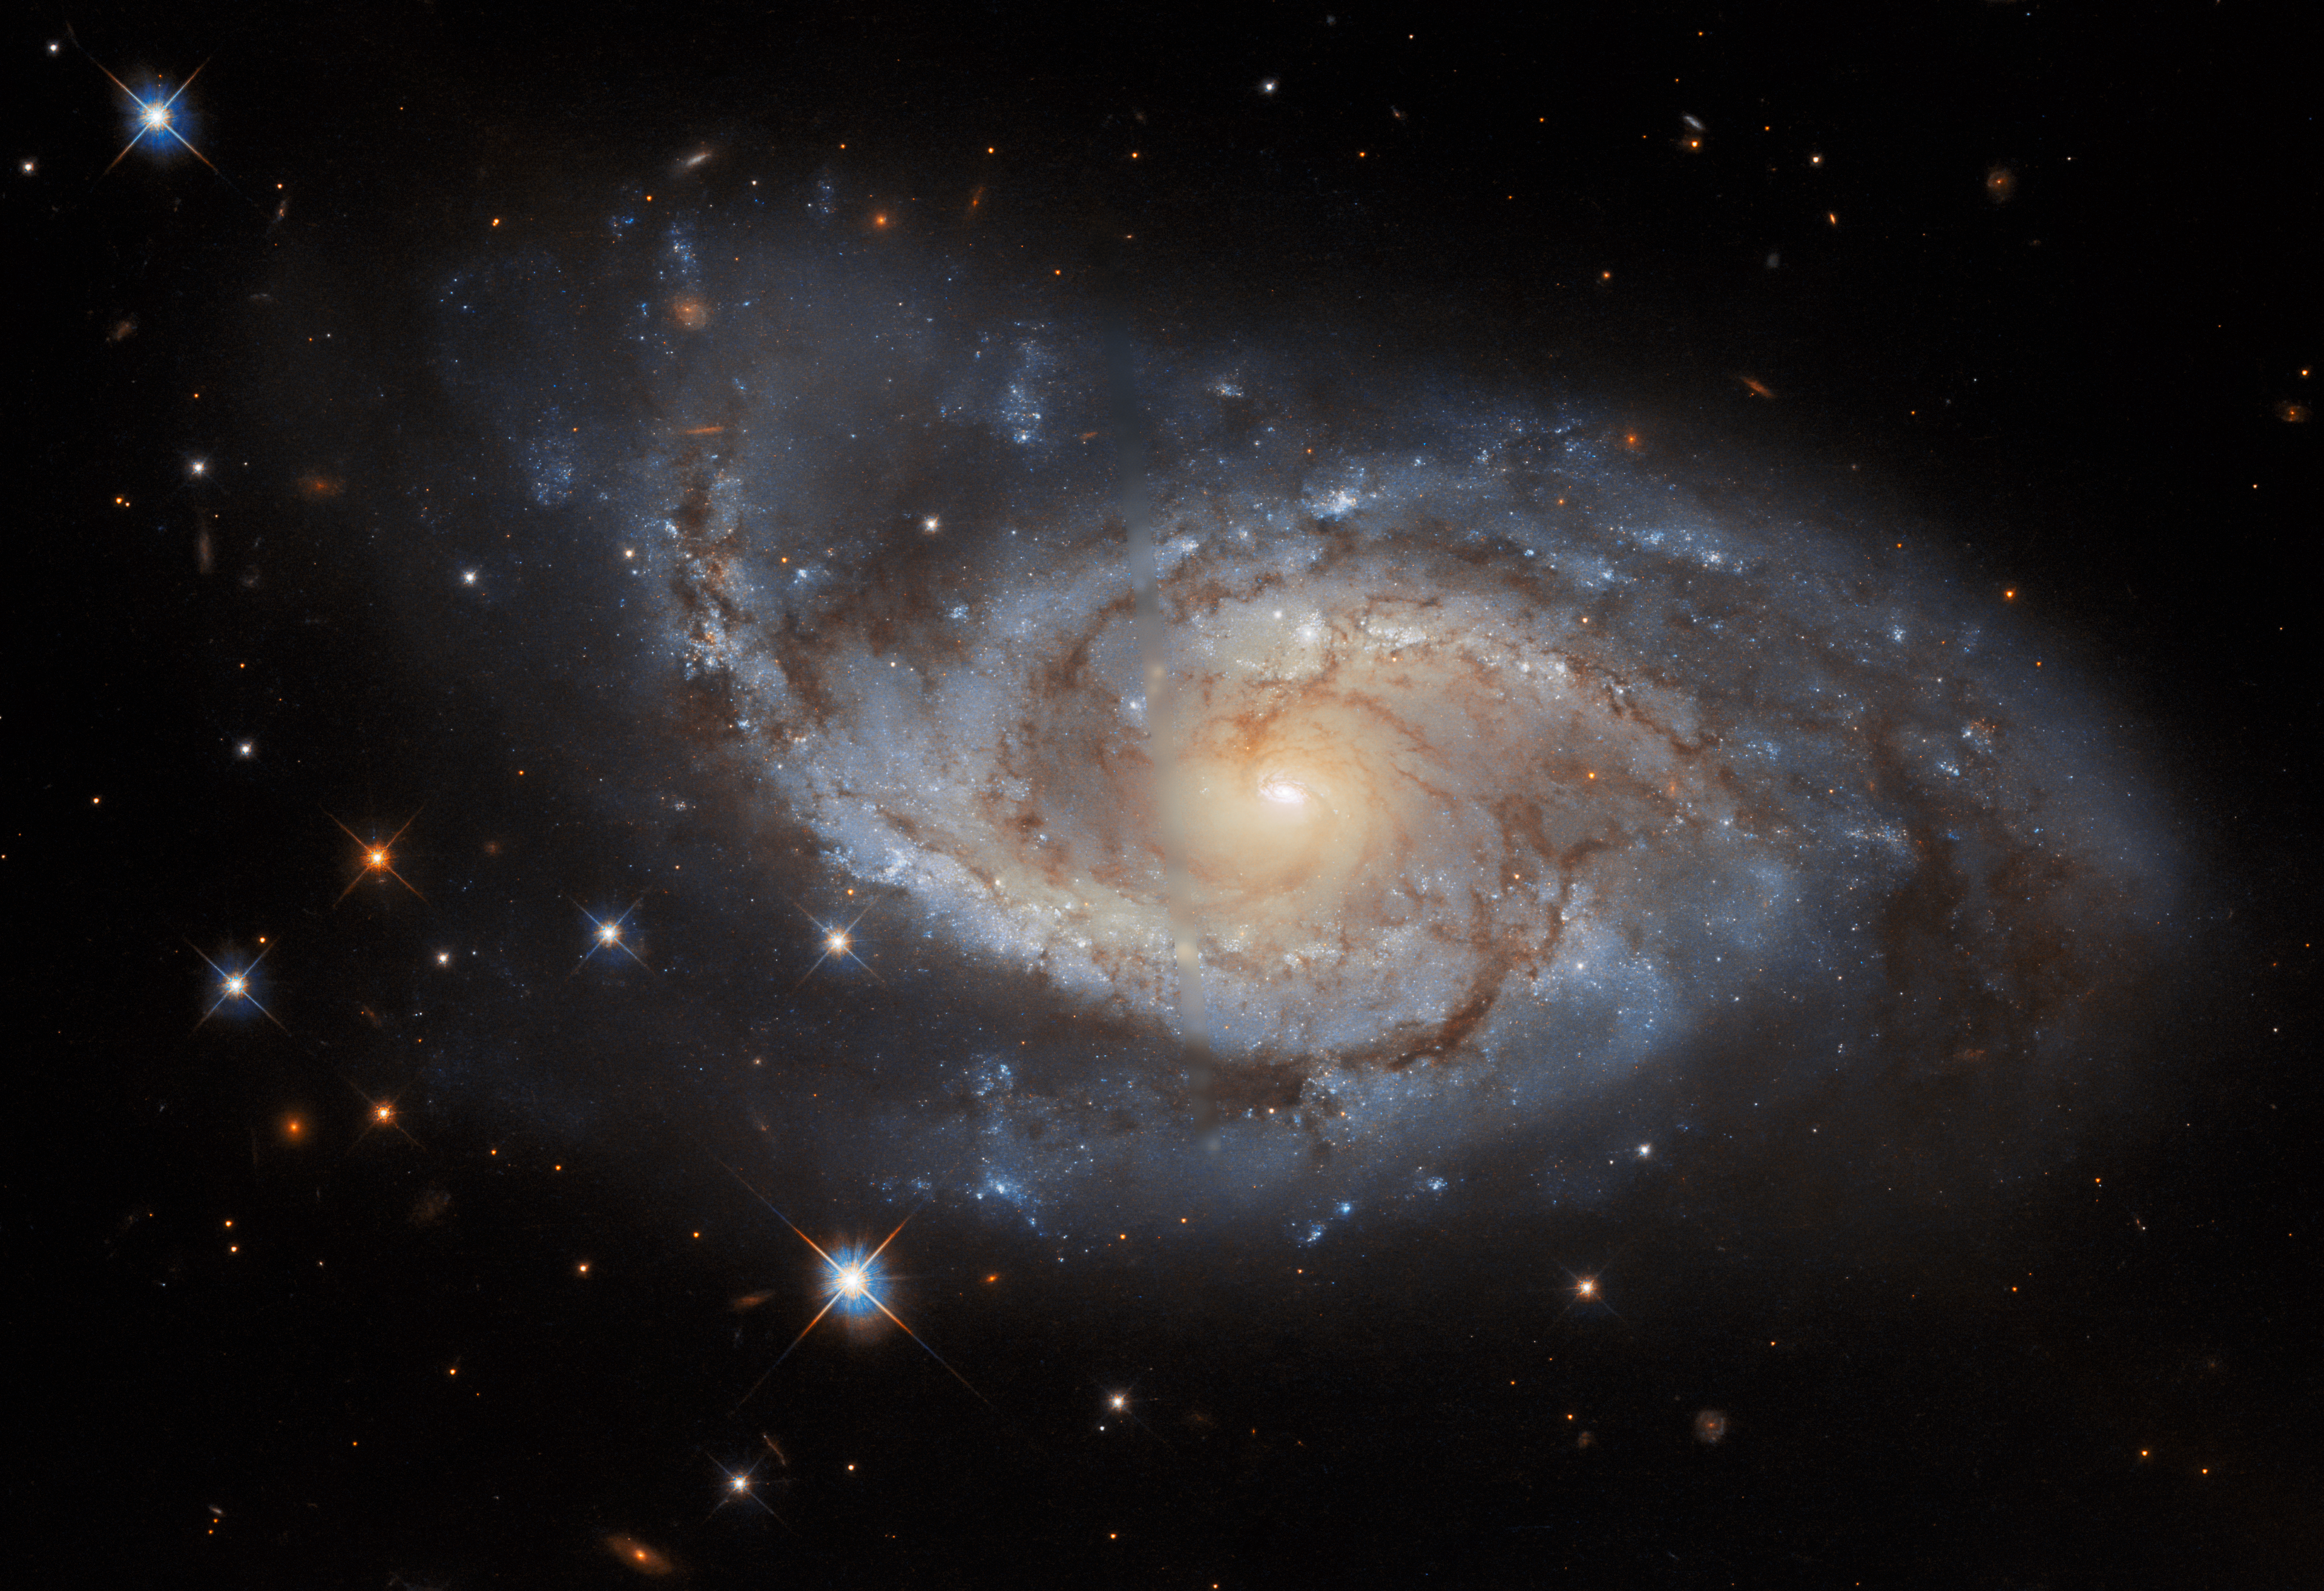

Sail of Stars

The spiral arms of the galaxy NGC 3318 are lazily draped across this image from the NASA/ESA Hubble Space Telescope. This spiral galaxy lies in the constellation Vela and is roughly 115 million light-years away from Earth. Vela was originally part of a far larger constellation, known as Argo Navis after the fabled ship Argo from Greek mythology, but this unwieldy constellation proved to be impractically large. Argo Navis was split into three separate parts called Carina, Puppis, and Vela — each named after part of the Argo. As befits a galaxy in a nautically inspired constellation, the outer edges of NGC 3318 almost resemble a ship’s sails billowing in a gentle breeze.

Credit: ESA/Hubble & NASA, ESO, R. J. Foley Acknowledgement: R. Colombari